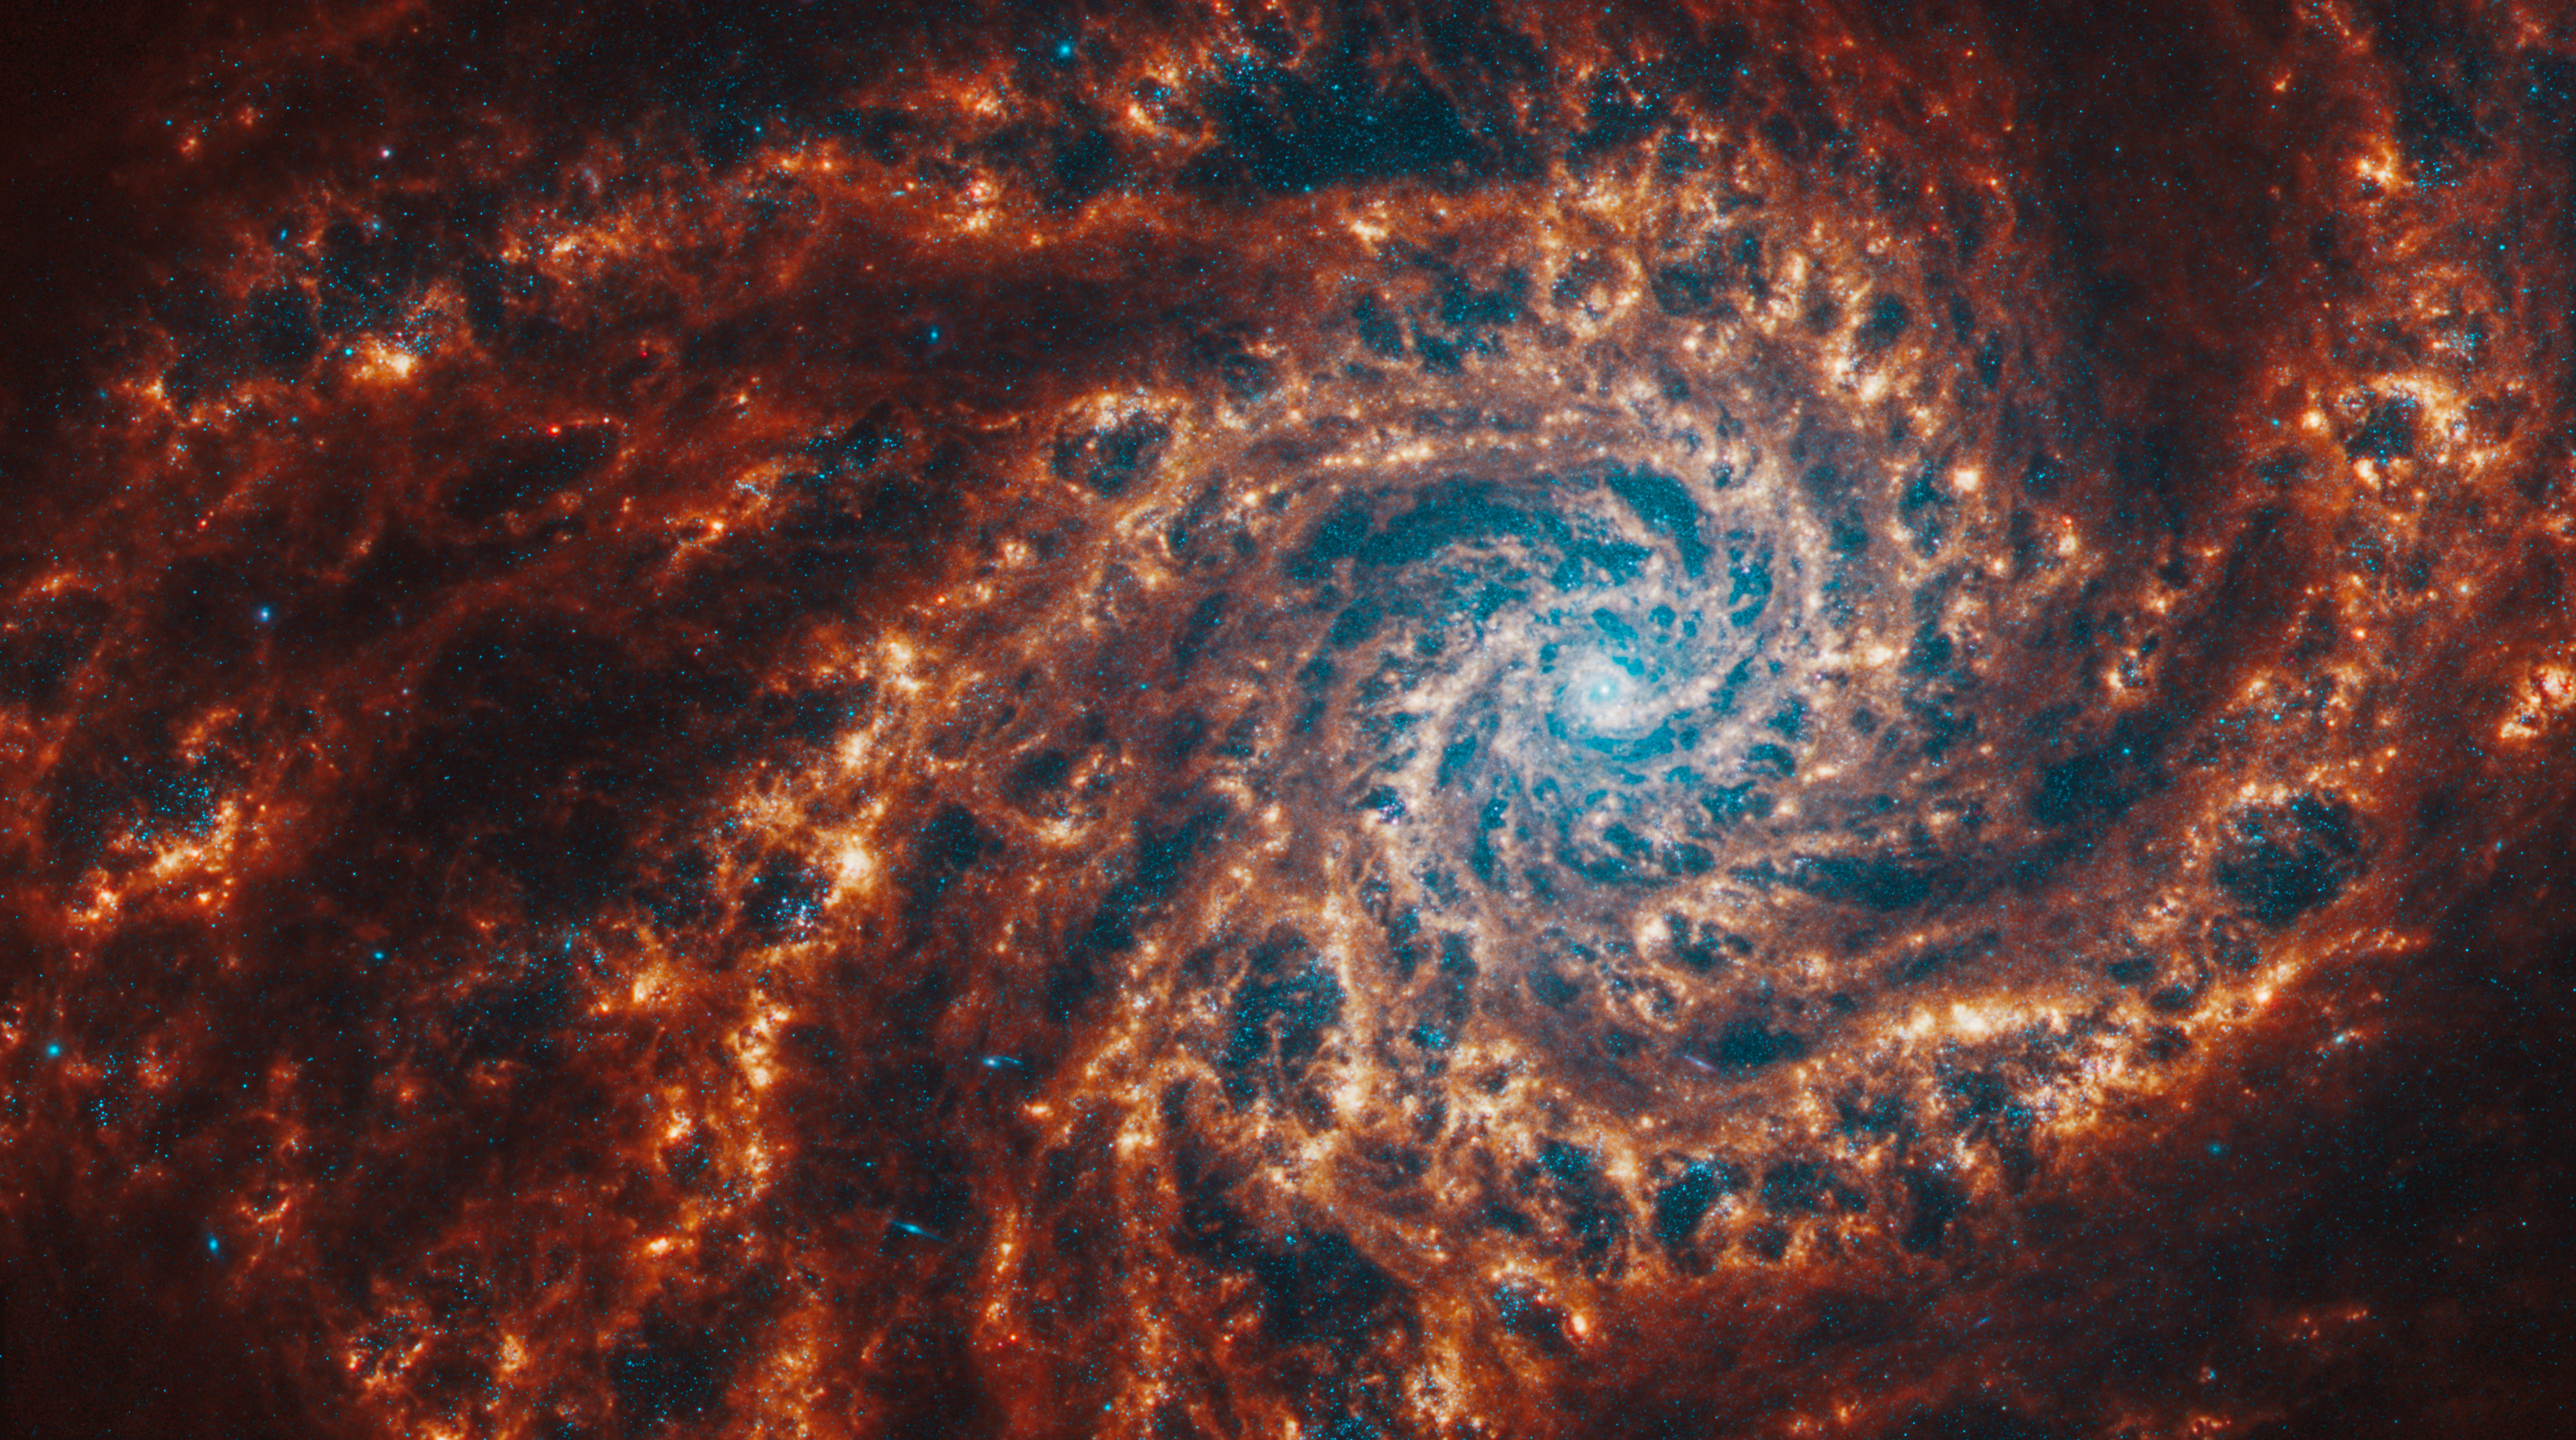

NGC 4254

This spiral galaxy was observed as part of the Physics at High Angular resolution in Nearby GalaxieS (PHANGS) program, a large project that includes observations from several space- and ground-based telescopes of many galaxies to help researchers study all phases of the star formation cycle, from the formation of stars within dusty gas clouds to the energy released in the process that creates the intricate structures revealed by Webb’s new images.

NGC 4254 is 50 million light-years away in the constellation Coma Berenices.

Learn more about what can be seen in this vast collection of Webb images here.

Credit: NASA, ESA, CSA, STScI, J. Lee (STScI), T. Williams (Oxford), PHANGS Team